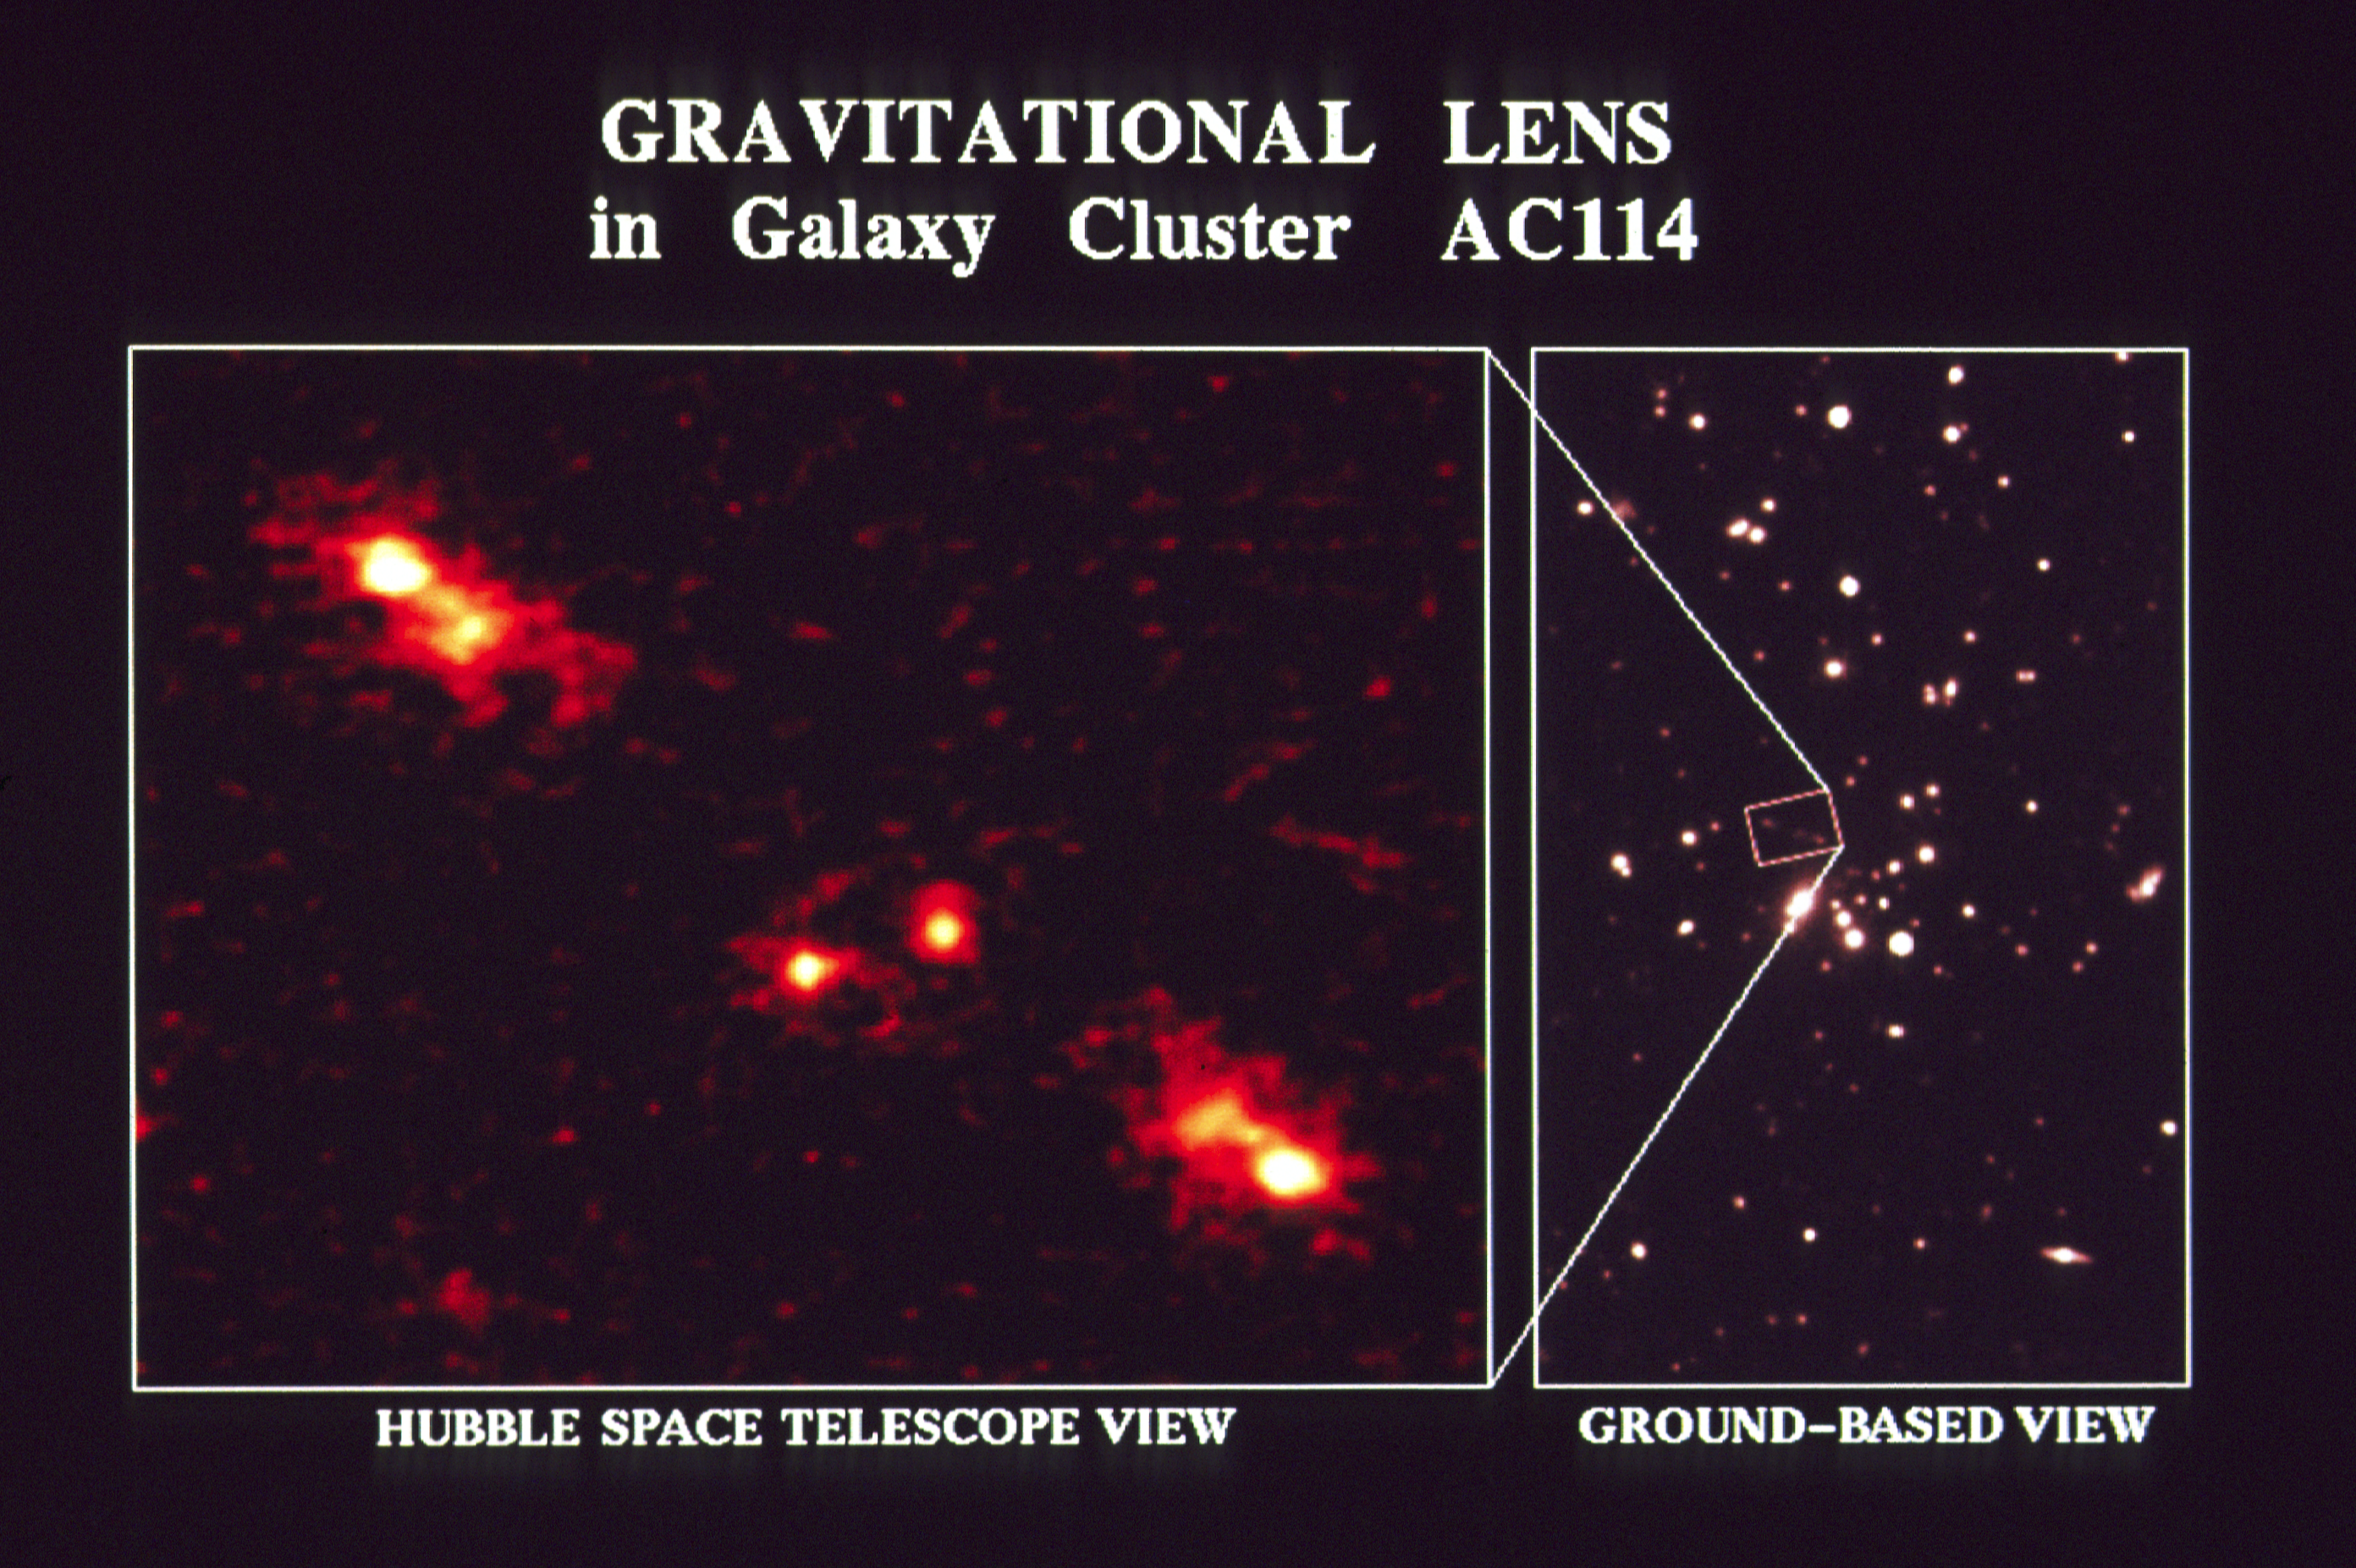

Gravitational lens in galaxy cluster AC 114

The NASA/ESA Hubble Space Telescope photograph (left) shows a pair of L-shaped images with striking mirror-symmetry. These are thought to arise from a very distant galaxy seen through a cluster of foreground galaxies (right). The gravity of the galaxy cluster acts as a natural magnifying glass, bending and focusing the light of the more distant Source into several images, each of which is apparently larger and brighter than would otherwise be the case. This rare combination of Hubble's powerful telescope mirrors and the natural telephoto lens gives astronomers unprecedented information on the nature of very distant galaxies, and on the distribution and nature of matter in the foreground cluster. The two compact objects in the center of the HST image are thought to be unrelated galaxies in the foreground cluster.

The observations were made with Hubble's Wide Field Camera in one of the first long exposures (six hours) with the orbiting observatory.

Credit: NASA & ESA